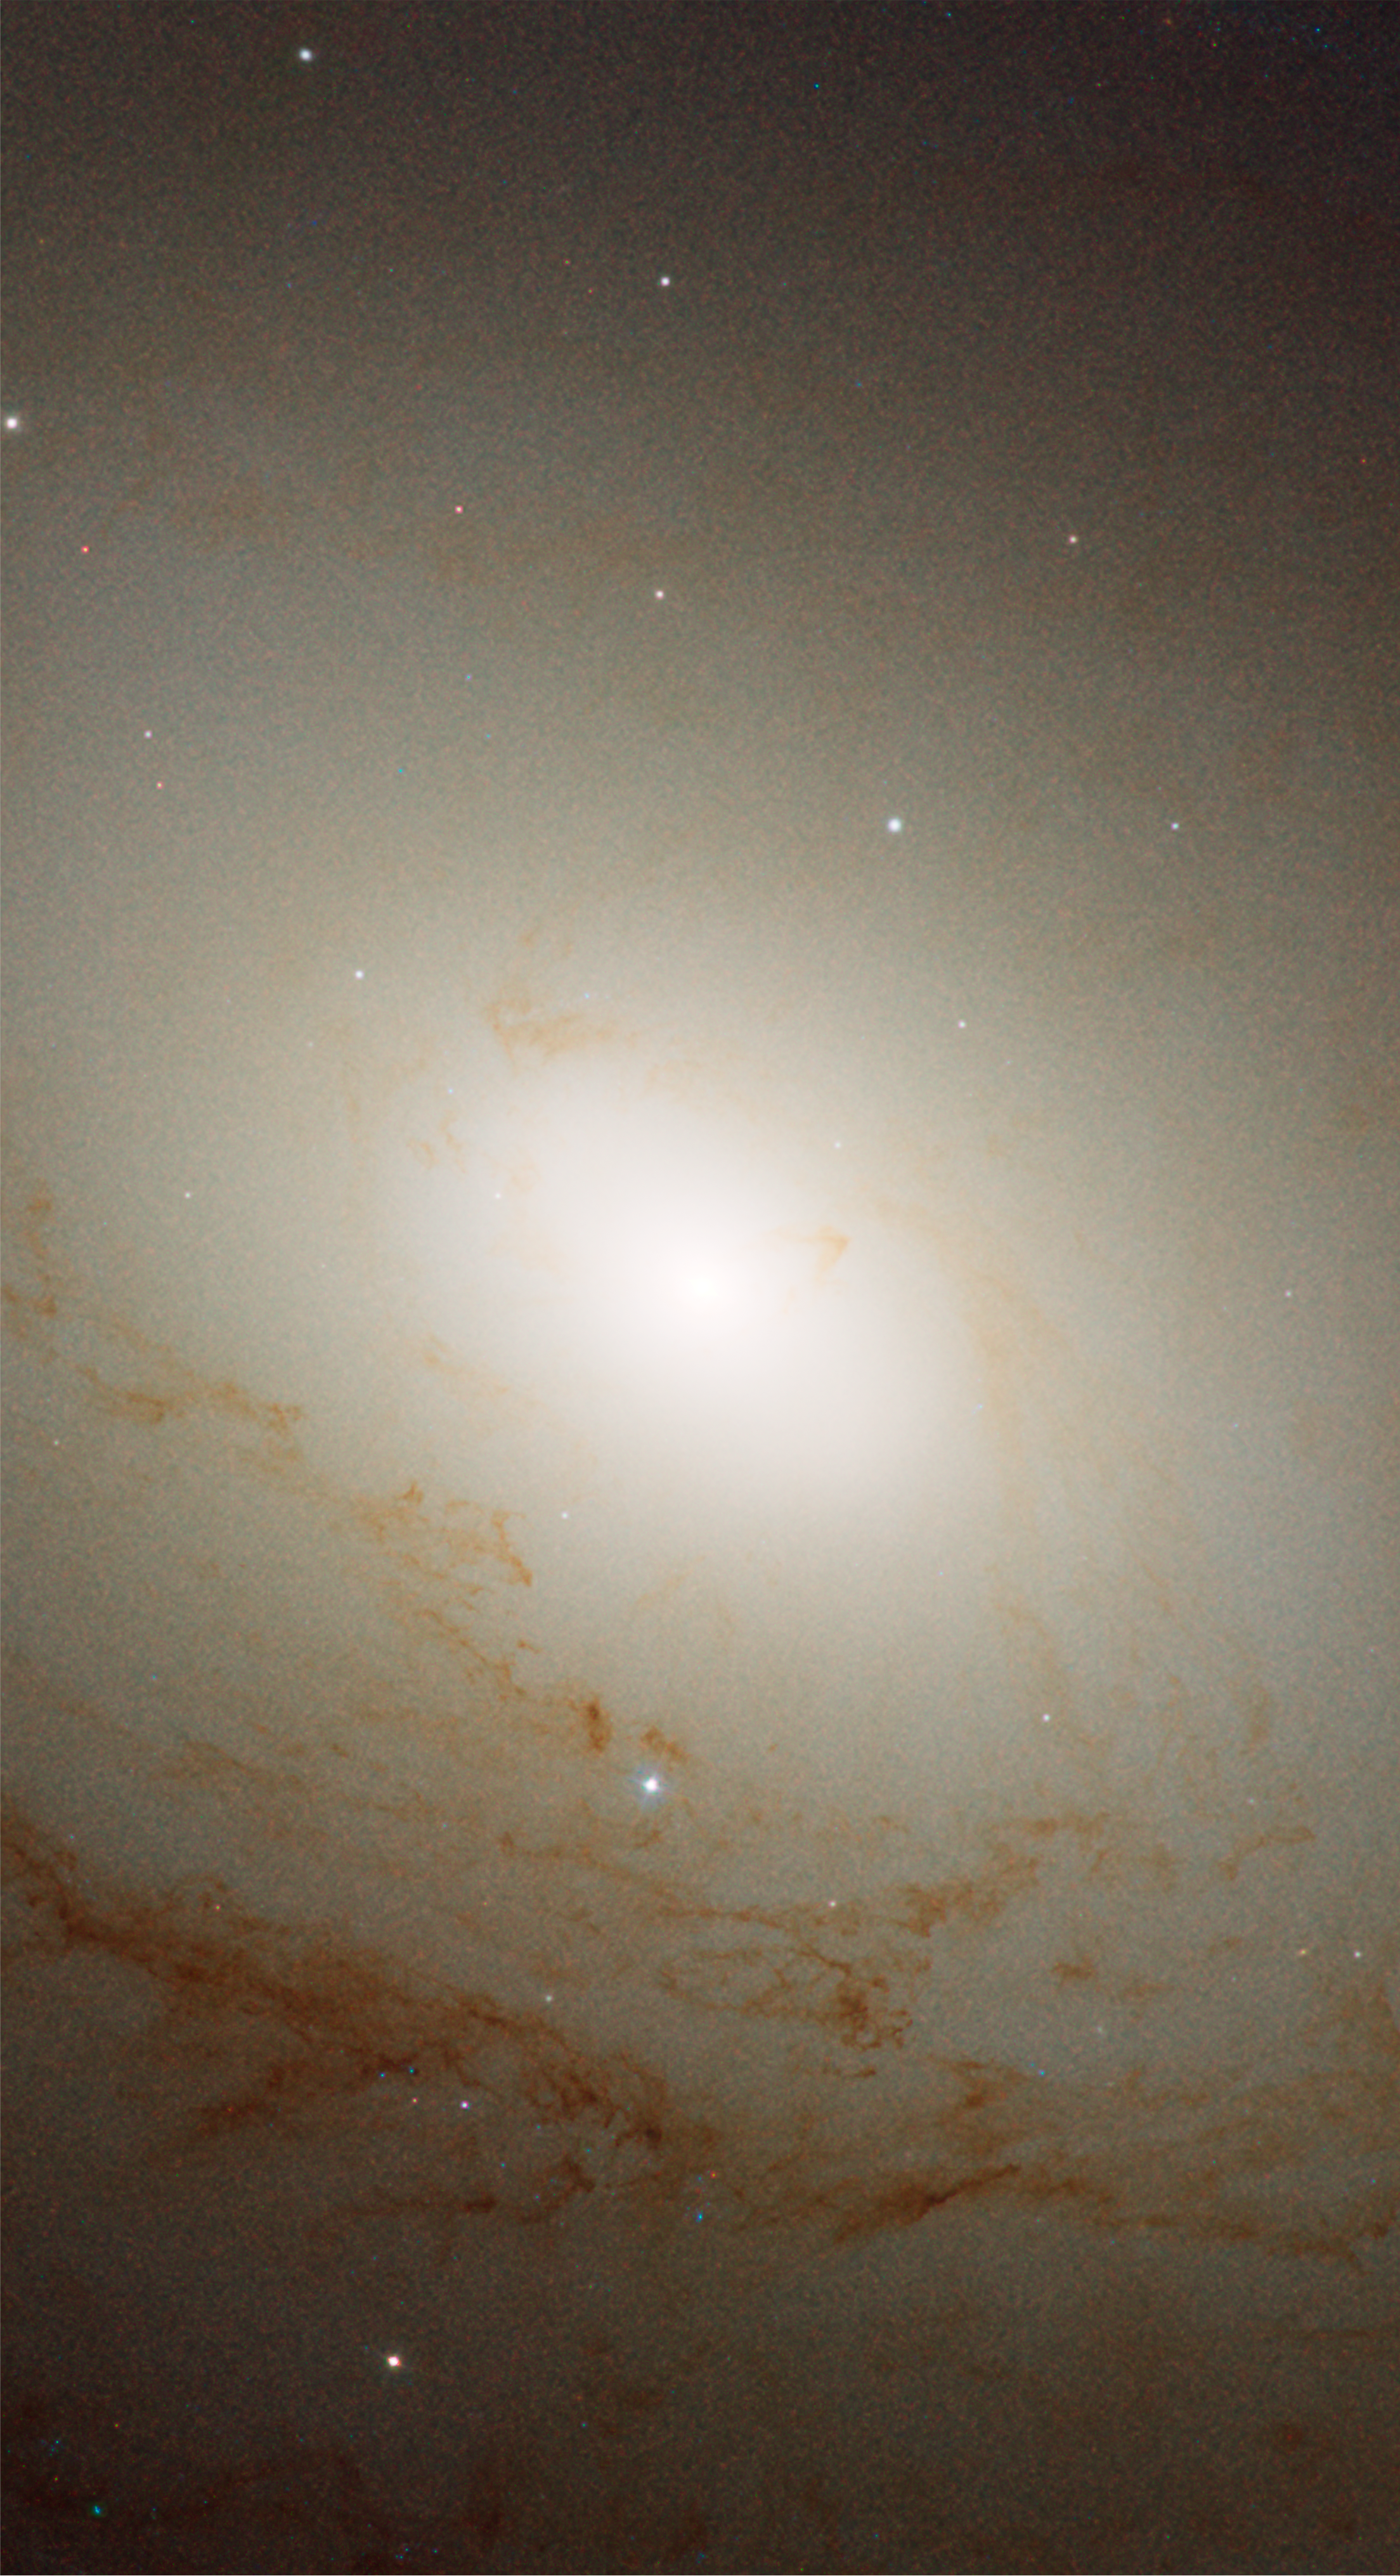

Spiral Galaxy M81 Details 1

Inner bulge and nucleus of M81.

Credit: NASA, ESA and the Hubble Heritage Team (STScI/AURA). Acknowledgment: A. Zezas and J. Huchra (Harvard-Smithsonian Center for Astrophysics)